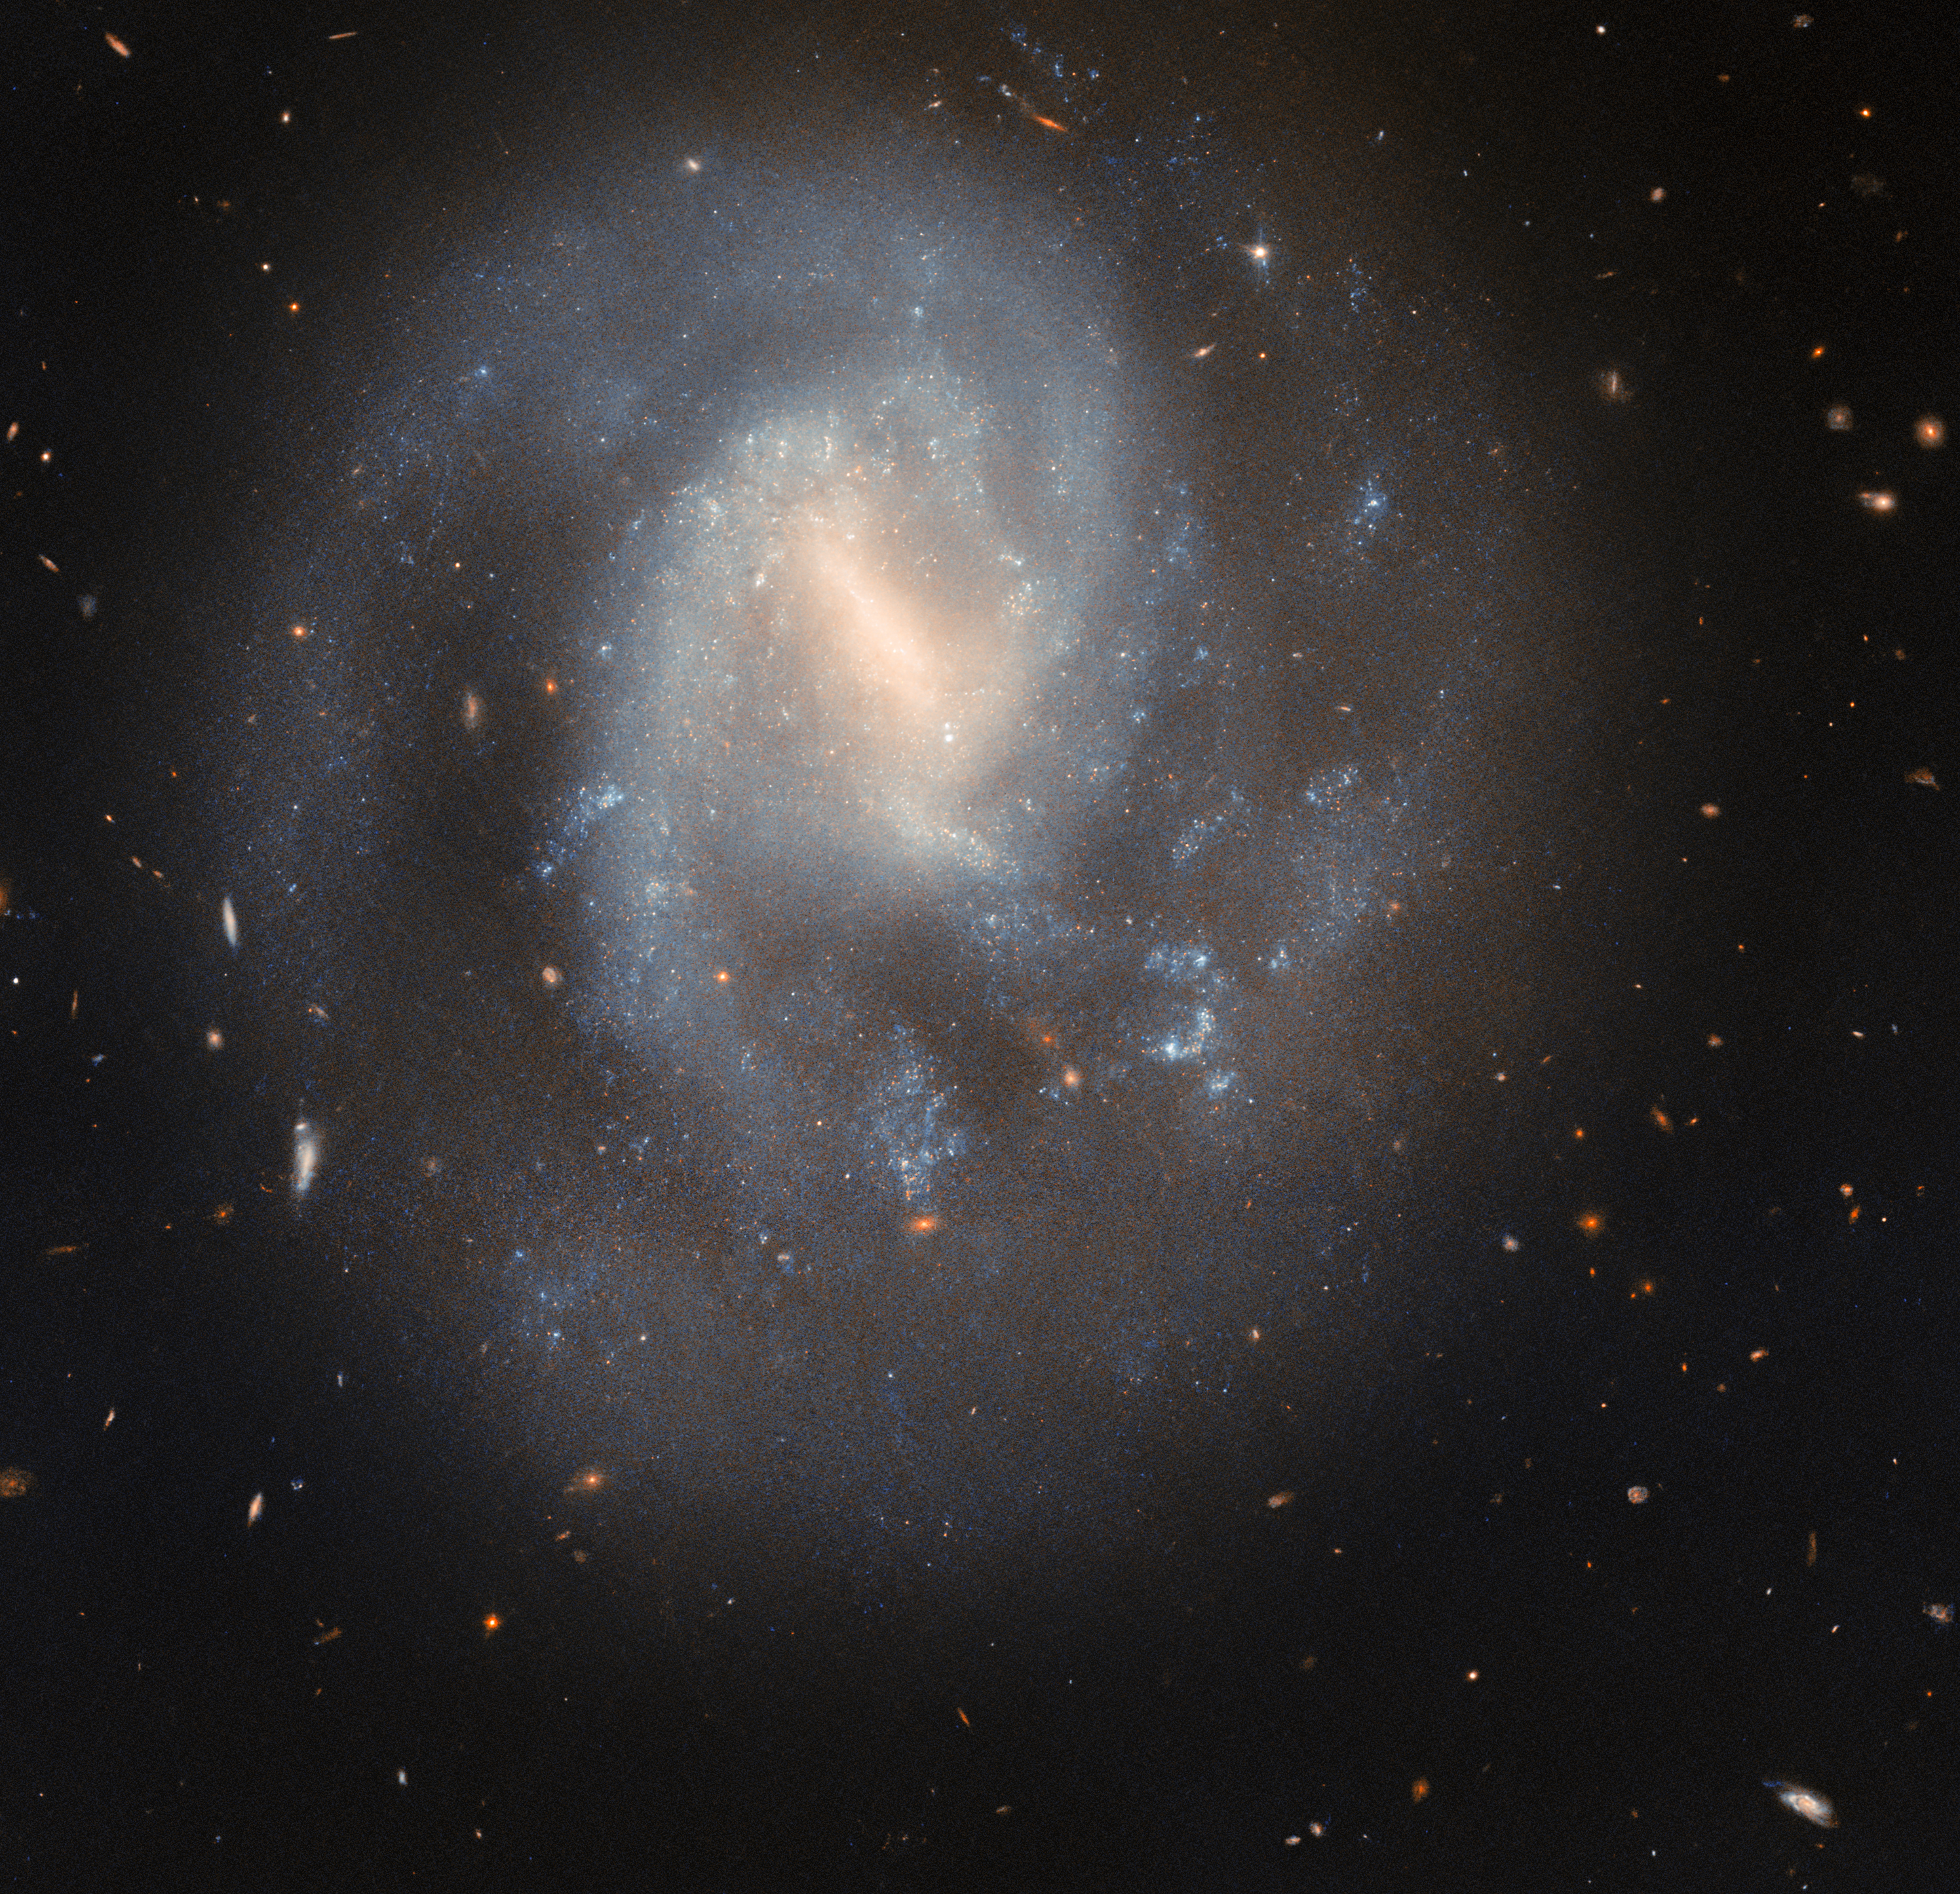

Stirring the interstellar soup

This serene spiral galaxy hides a cataclysmic past. The galaxy IC 758, shown here in today’s NASA/ESA Hubble Space Telescope Picture of the Week, is situated 60 million light-years away in the constellation Ursa Major.

In this Hubble image captured in 2023, IC 758 appears peaceful, its soft blue spiral arms curving gently around its hazy barred centre. But in 1999, astronomers spotted a powerful explosion in this galaxy: the supernova SN 1999bg. SN 1999bg marked the dramatic end of a star far more massive than the Sun.

It’s not yet known how massive this star was before it exploded. Researchers will use these Hubble observations to measure the masses of stars in SN 1999bg’s neighbourhood, which will help them estimate the mass of the star that went supernova. The Hubble data may also reveal whether SN 1999bg’s progenitor star had a companion, which would give additional clues about the star’s life and death.

A supernova represents more than just the demise of a single star — it’s also a powerful force that can shape its neighbourhood. When a massive star collapses, triggering a supernova, its outer layers rebound off its shrunken core. The explosion stirs the interstellar soup of gas and dust out of which new stars form. This interstellar shakeup can scatter and heat nearby gas clouds, preventing new stars from forming, or it can compress them, creating a burst of new stars. The cast-off layers also become ingredients for new stars.

Credit: ESA/Hubble & NASA, C. Kilpatrick